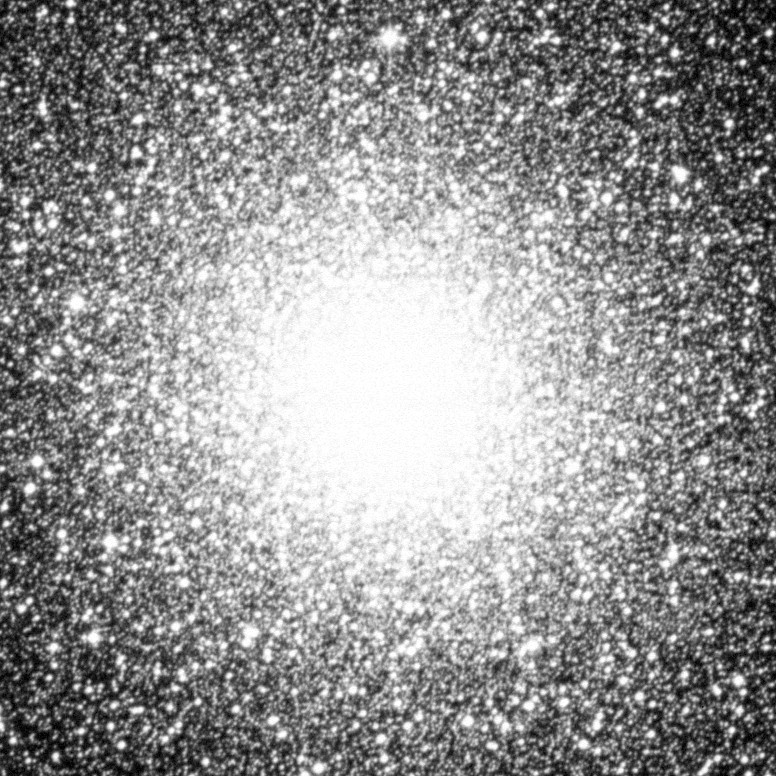

Blue Stragglers in Globular Cluster 47 Tucanae

This ground-based telescope image shows the entire crowded core of 47 Tucanae, located 15, 000 light-years away in the constellation Tucana.

Credit: Rex Saffer (Villanova University) and Dave Zurek (STScI), and NASA/ESA